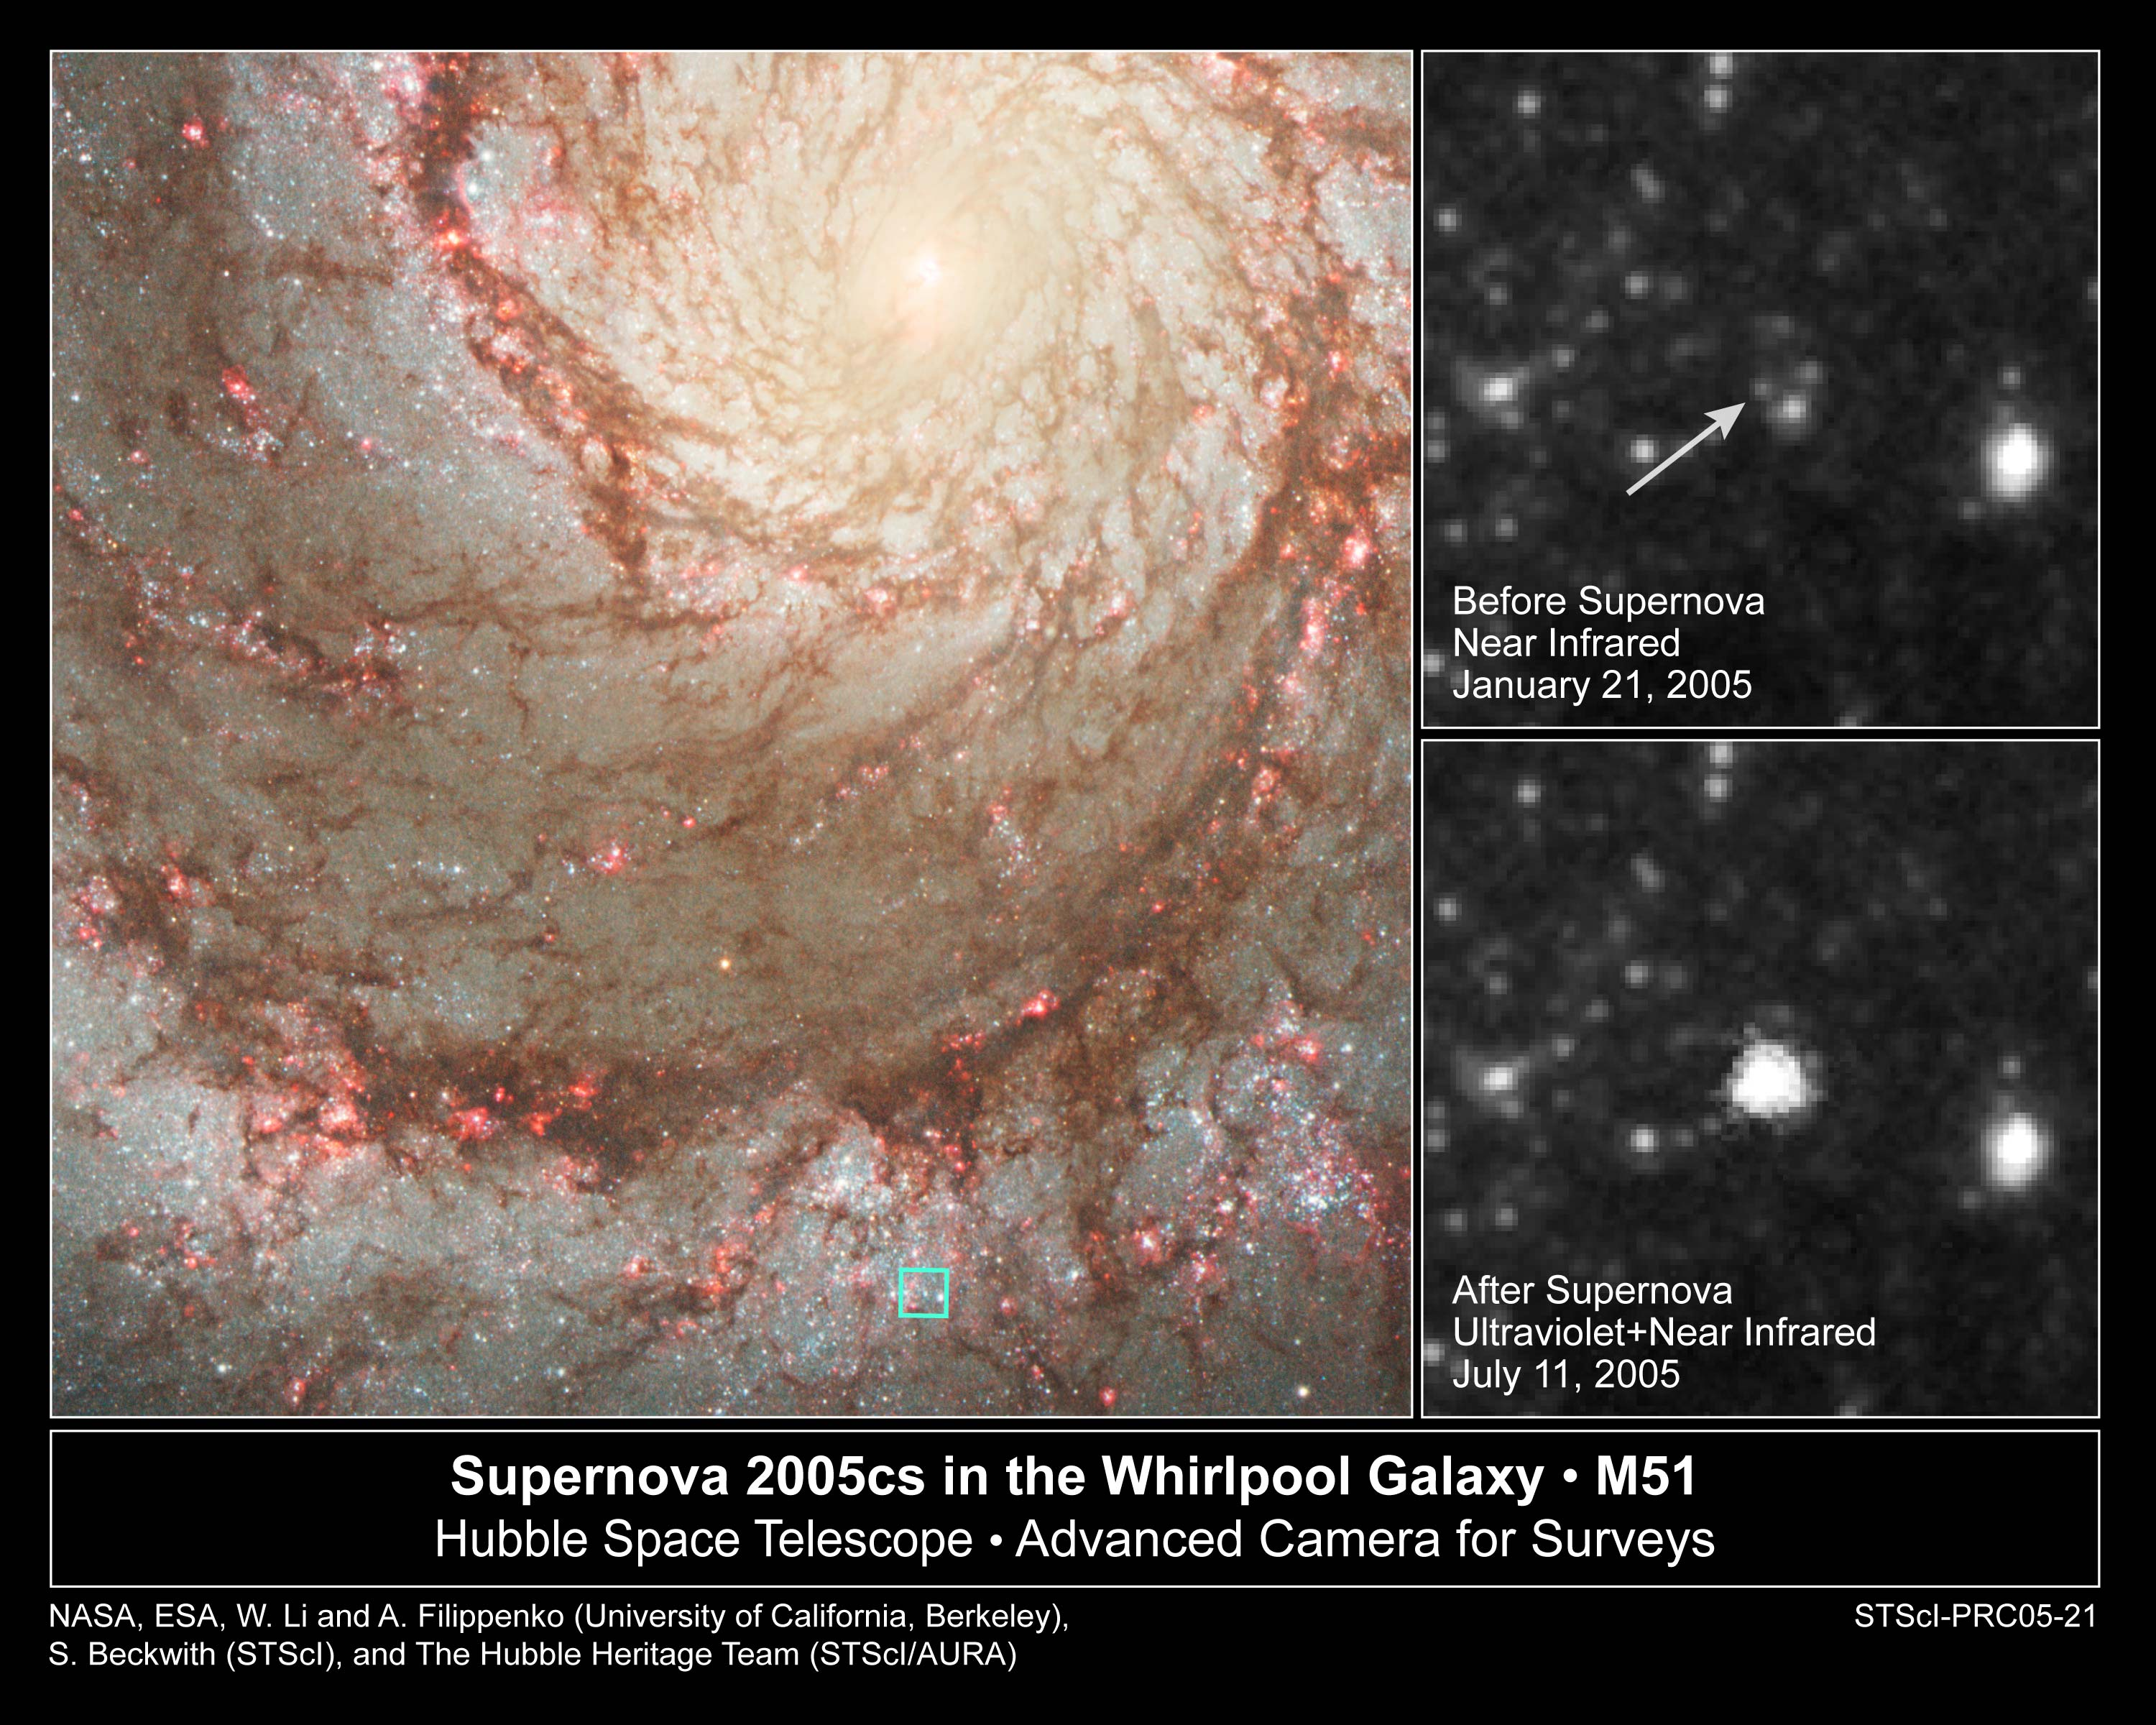

Hubble Pinpoints Doomed Star that Explodes as Supernova

Amidst the glitter of billions of stars in the majestic spiral galaxy called the Whirlpool (M51), a massive star abruptly ends its life in a brilliant flash of light. NASA/ESA Hubble Space Telescope snapped images of the exploding star, called supernova (SN) 2005cs, 12 days after its discovery. Astronomers then compared those photos with Hubble images of the same region before the supernova blast to pinpoint the progenitor star (the star that exploded).

Credit: NASA, ESA, W. Li and A. Filippenko (University of California, Berkeley), S. Beckwith (STScI), and The Hubble Heritage Team STScI/AURA)